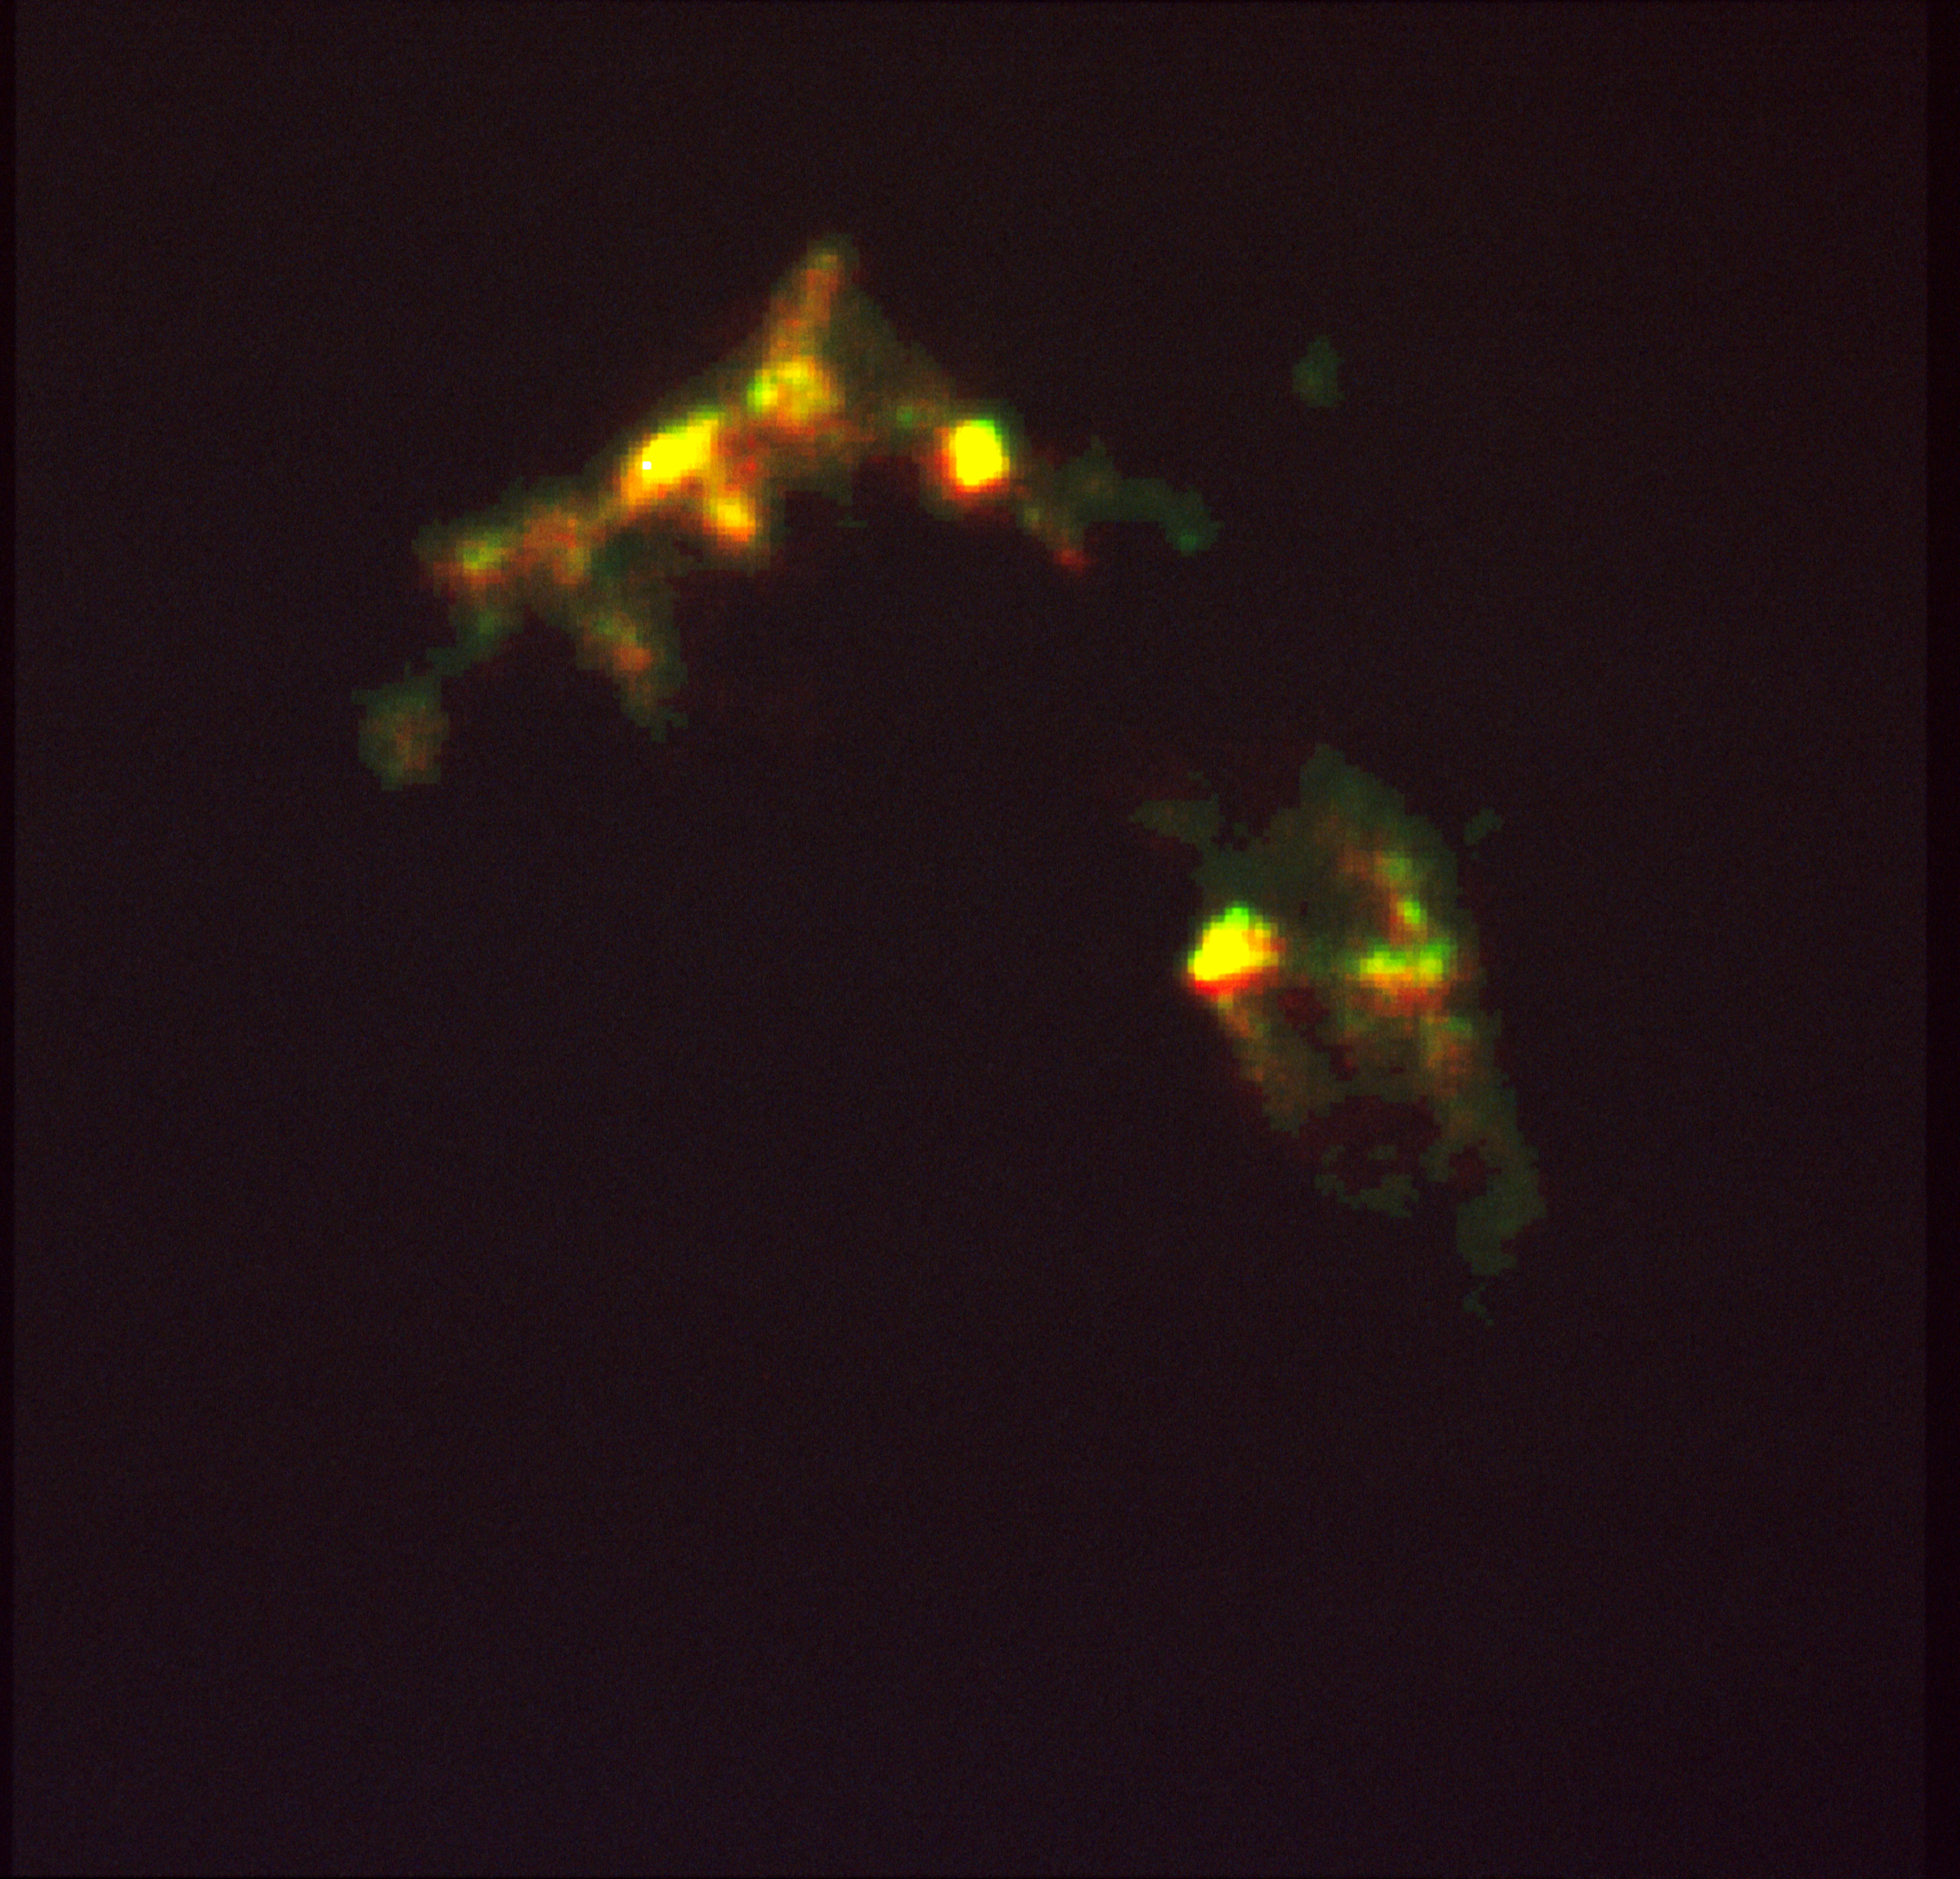

HST reveals growth processes of young star

A NASA/ESA Hubble Space Telescope image of a huge, complex cloud of gas heated by shock waves from jets of gas produced by the birth of a new star. Called Herbig-Haro object #2 (HH-2) the cloud is a visible manifestation of physical processes that occur early in the evolution of a star.

The photograph was produced from three images obtained with the Wide Field/Planetary Camera (WFIPC). Exposures were taken through different filters to examine light emitted by HH-2 in emission lines of ionized oxygen (coded blue), hydrogen (coded green), and sulfur (coded red). The blue spots represent the highest temperature gas. The red regions identify cooler gas. In the brightest portions of the object, emissions from all three components combine to produce white features.

Credit: Richard Schwartz (Univ. of Missouri, St. Louis), Martin Cohen (Univ. of California, Berkeley), Burton Jones (Univ. of California, Santa Cruz), Karl-Heinz Bohm (Univ. of Washington), John Raymond and Lee Hartmann (HarvardSmithsonian Center for Astrophysics), Reinhard Mundt (Max-Planck-lnstitut fur Astronomle), Michael Dopita (Mt. Stromlo and Siding Spring Observatories), and Angie Schultz (Washington Univ. at St. Louis/Univ. of Missouri at St. Louis).